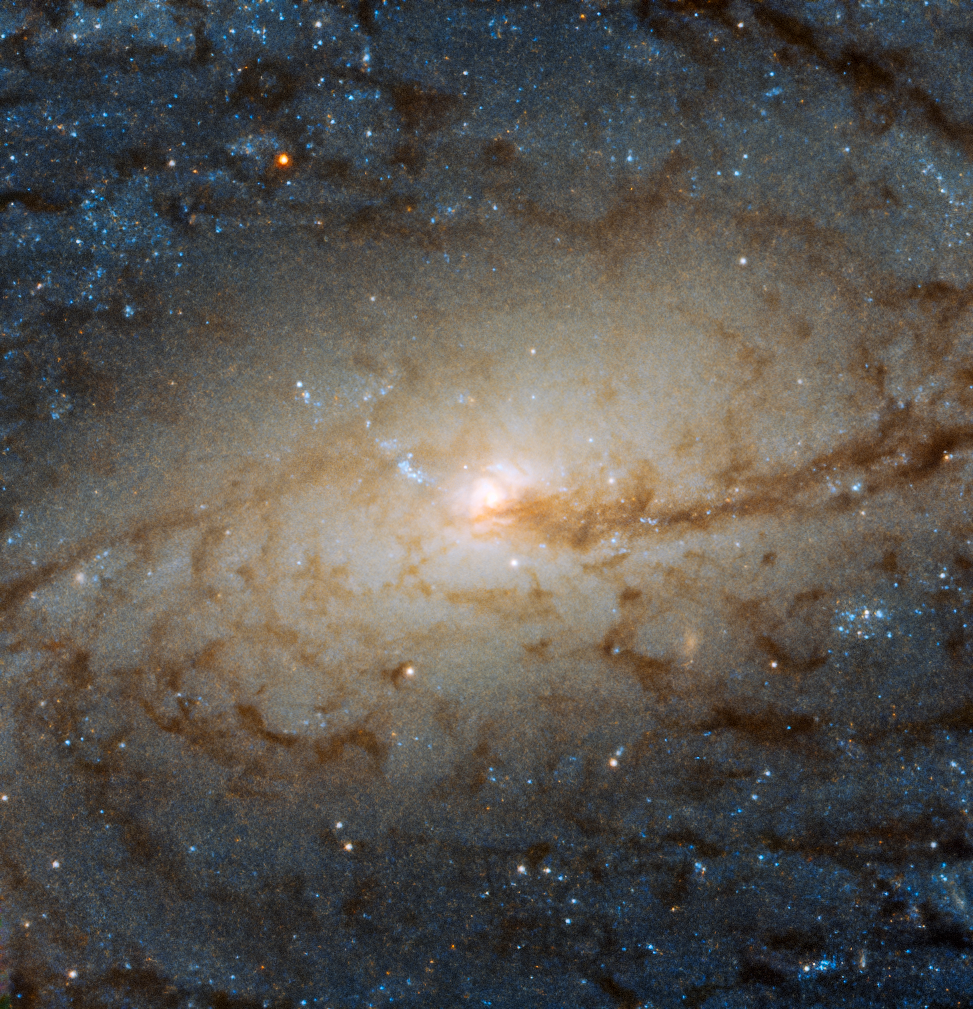

A Galactic Traffic Jam

The barred spiral galaxy NGC 3887, seen here as viewed by the Wide Field Camera 3 aboard the NASA/ESA Hubble Space Telescope, lies over 60 million light-years away from us in the southern constellation of Crater (The Cup); it was discovered on 31 December 1785 by the German/British astronomer William Herschel.

Its orientation to us, while not exactly face-on, allows us to see NGC 3887’s spiral arms and central bulge in detail, making it an ideal target for studying a spiral galaxy’s winding arms and the stars within them.

The very existence of spiral arms was for a long time a problem for astronomers. The arms emanate from a spinning core and should therefore become wound up ever more tightly, causing them to eventually disappear after a (cosmologically) short amount of time. It was only in the 1960s that astronomers came up with the solution to this winding problem; rather than behaving like rigid structures, spiral arms are in fact areas of greater density in a galaxy’s disc, with dynamics similar to those of a traffic jam. The density of cars moving through a traffic jam increases at the centre of the jam, where they move more slowly. Spiral arms function in a similar way; as gas and dust move through the density waves they become compressed and linger, before moving out of them again.

Credit: ESA/Hubble & NASA, P. Erwin et al.